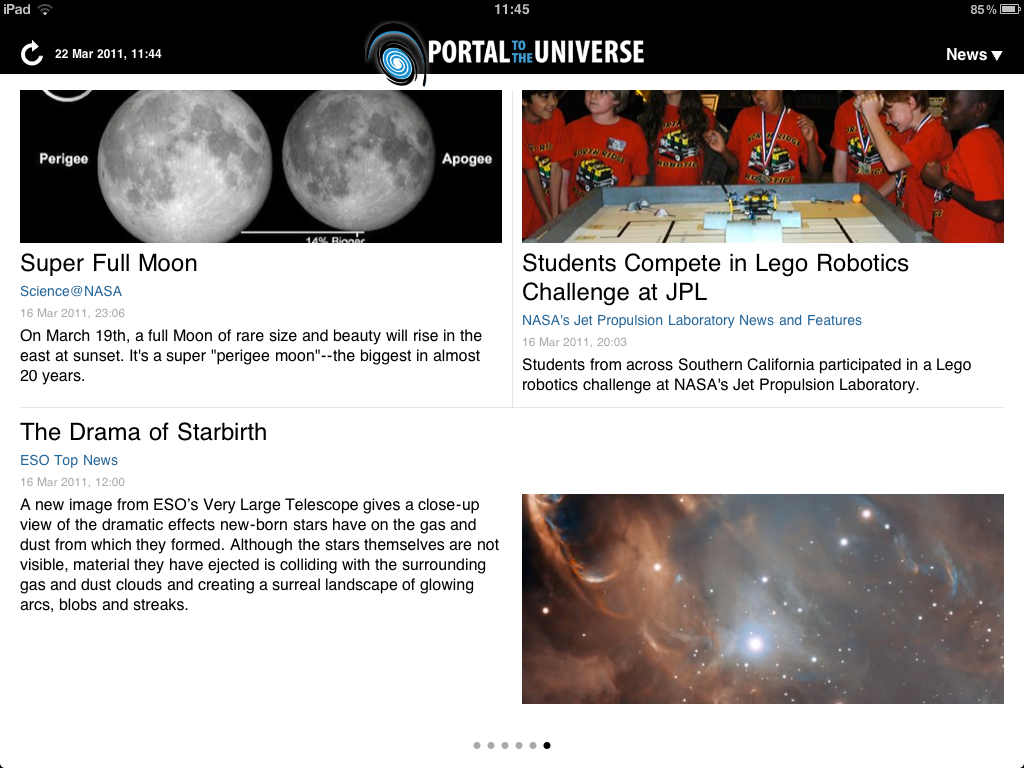

The portal to the Universe iPad app screenshot

The Portal To The Universe app is a free, one–stop–shop iPad app for all things astronomy. Designed in a magazine style, this free app brings the latest scientific breakthroughs gathered from hundreds of sources every day. It was never easier to be well informed about the latest space news. The image shows screenshots from the Portal to the Universe app. You can download the app for free from here.

Credit: ESA/Victor R. Ruiz